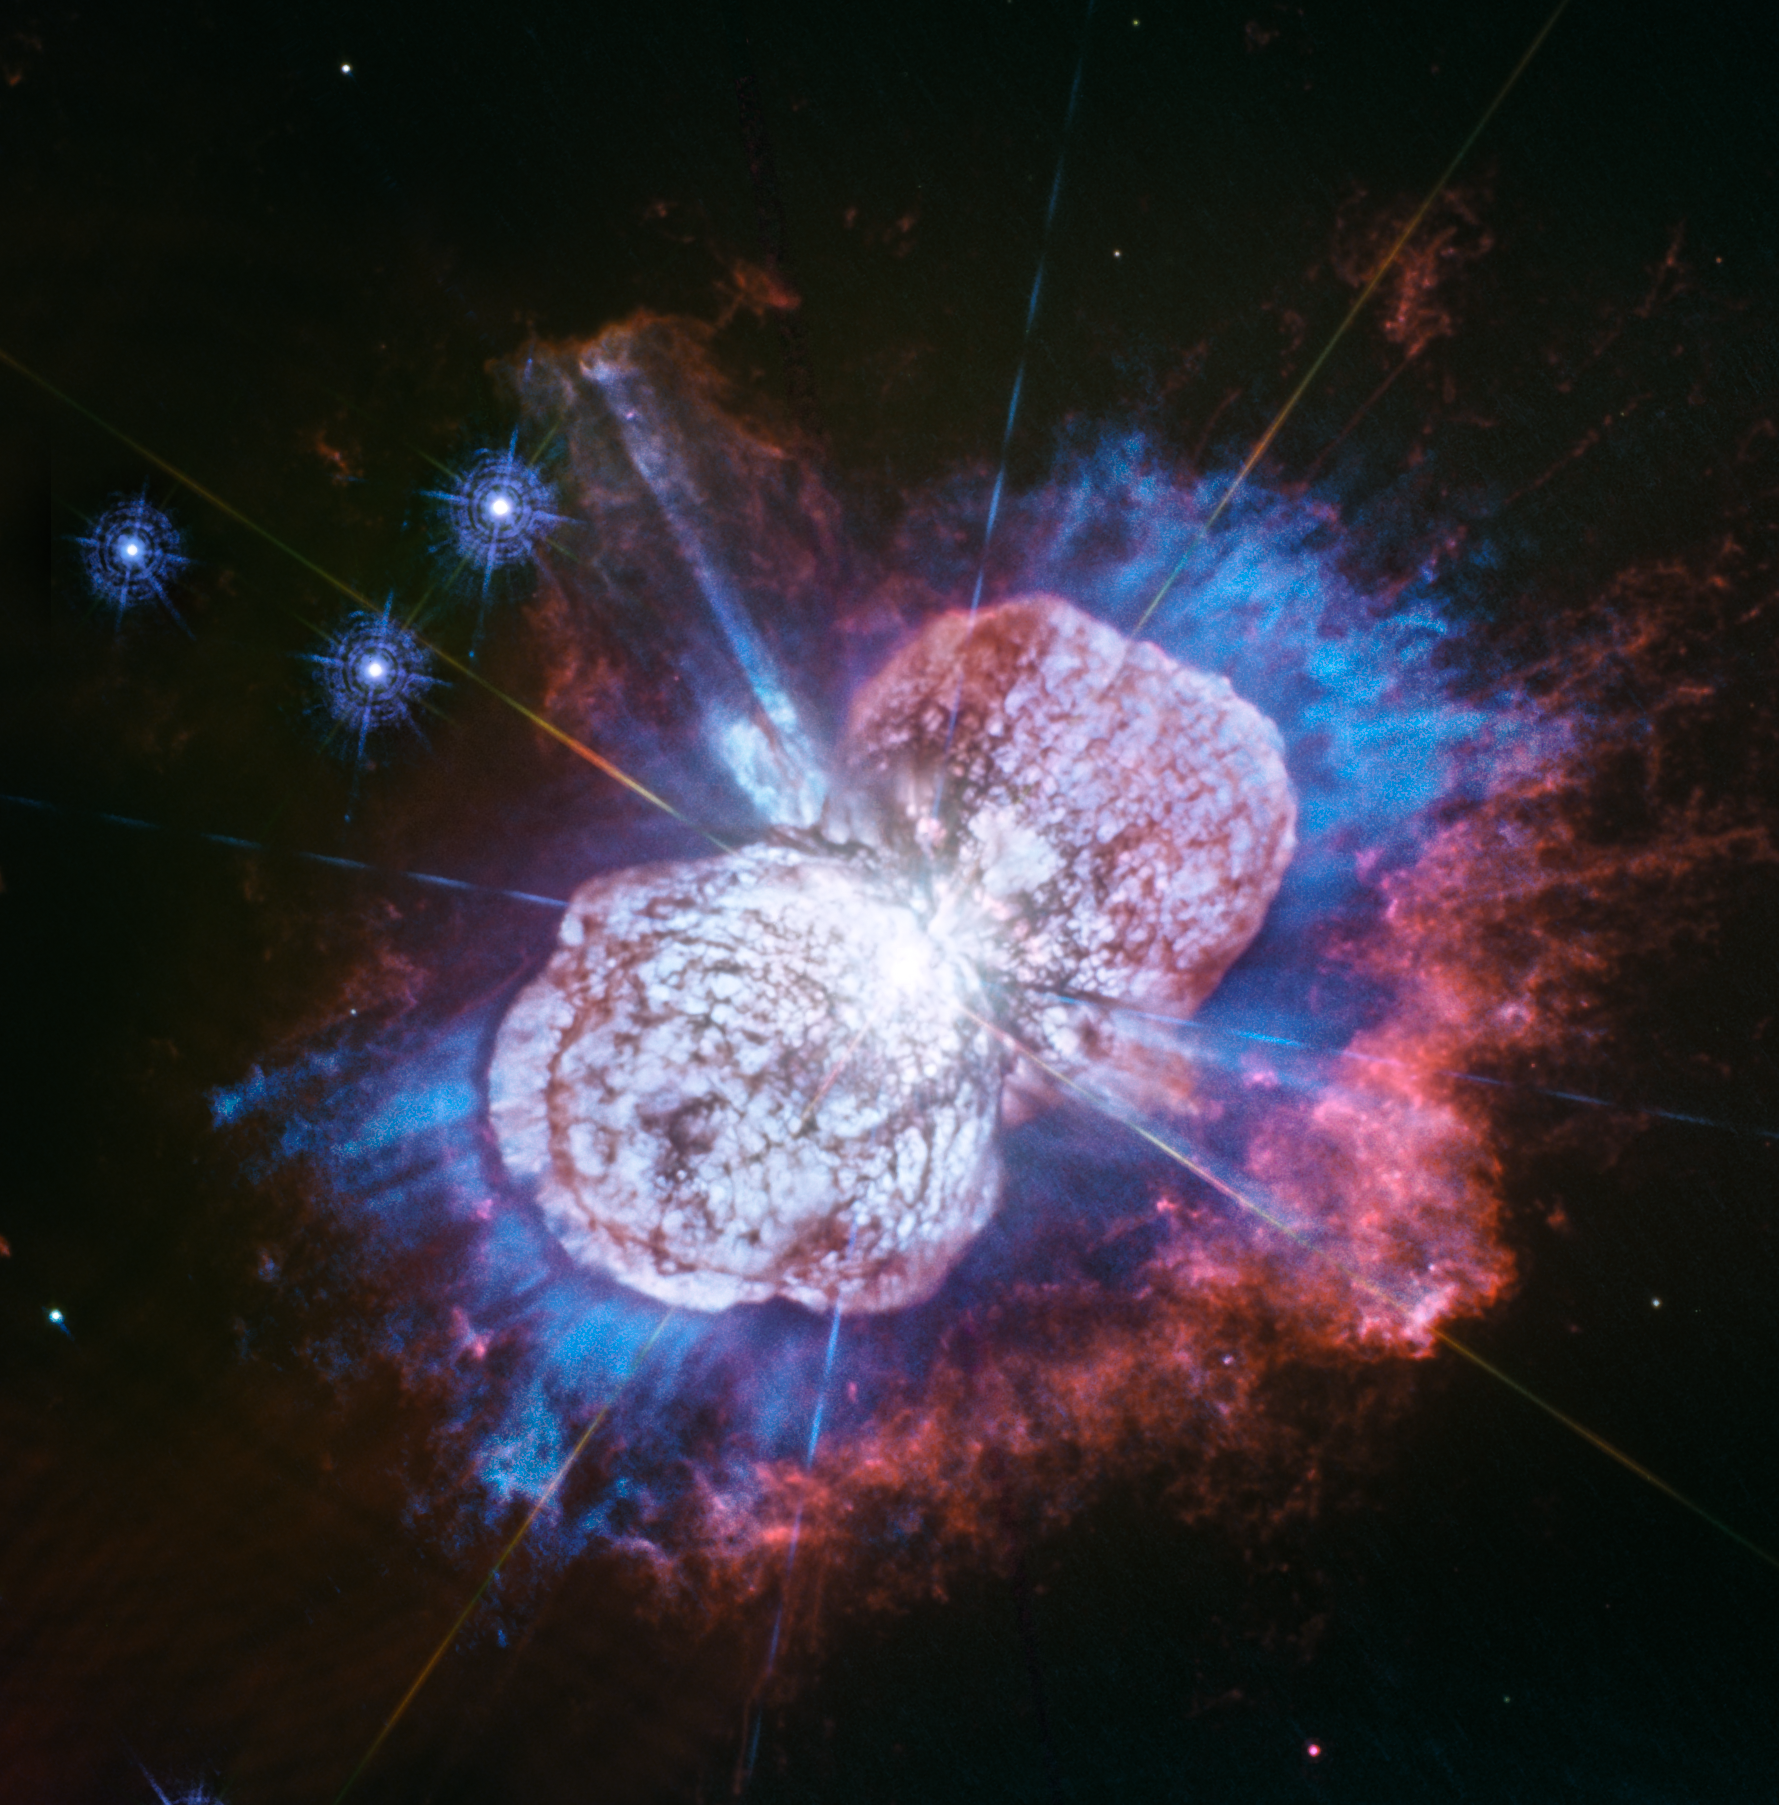

Cosmic Fireworks in Ultraviolet

Telescopes, including Hubble, have monitored the Eta Carinae star system for more than two decades. It has been prone to violent outbursts, including an episode in the 1840s during which ejected material formed the bipolar bubbles seen here.

Now, using Hubble’s Wide Field Camera 3 to probe the nebula in ultraviolet light, astronomers have uncovered the glow of magnesium embedded in warm gas (shown in blue) in places they had not seen it before. The luminous magnesium resides in the space between the dusty bipolar bubbles and the outer shock-heated nitrogen-rich filaments (shown in red). The streaks visible in the blue region outside the lower-left lobe are a striking feature of the image. These streaks are created when the star’s light rays poke through the dust clumps scattered along the bubble’s surface. Wherever the ultraviolet light strikes the dense dust, it leaves a long, thin shadow that extends beyond the lobe into the surrounding gas.

Eta Carinae resides 7500 light-years away.

Credit: NASA, ESA, N. Smith (University of Arizona, Tucson), and J. Morse (BoldlyGo Institute, New York)